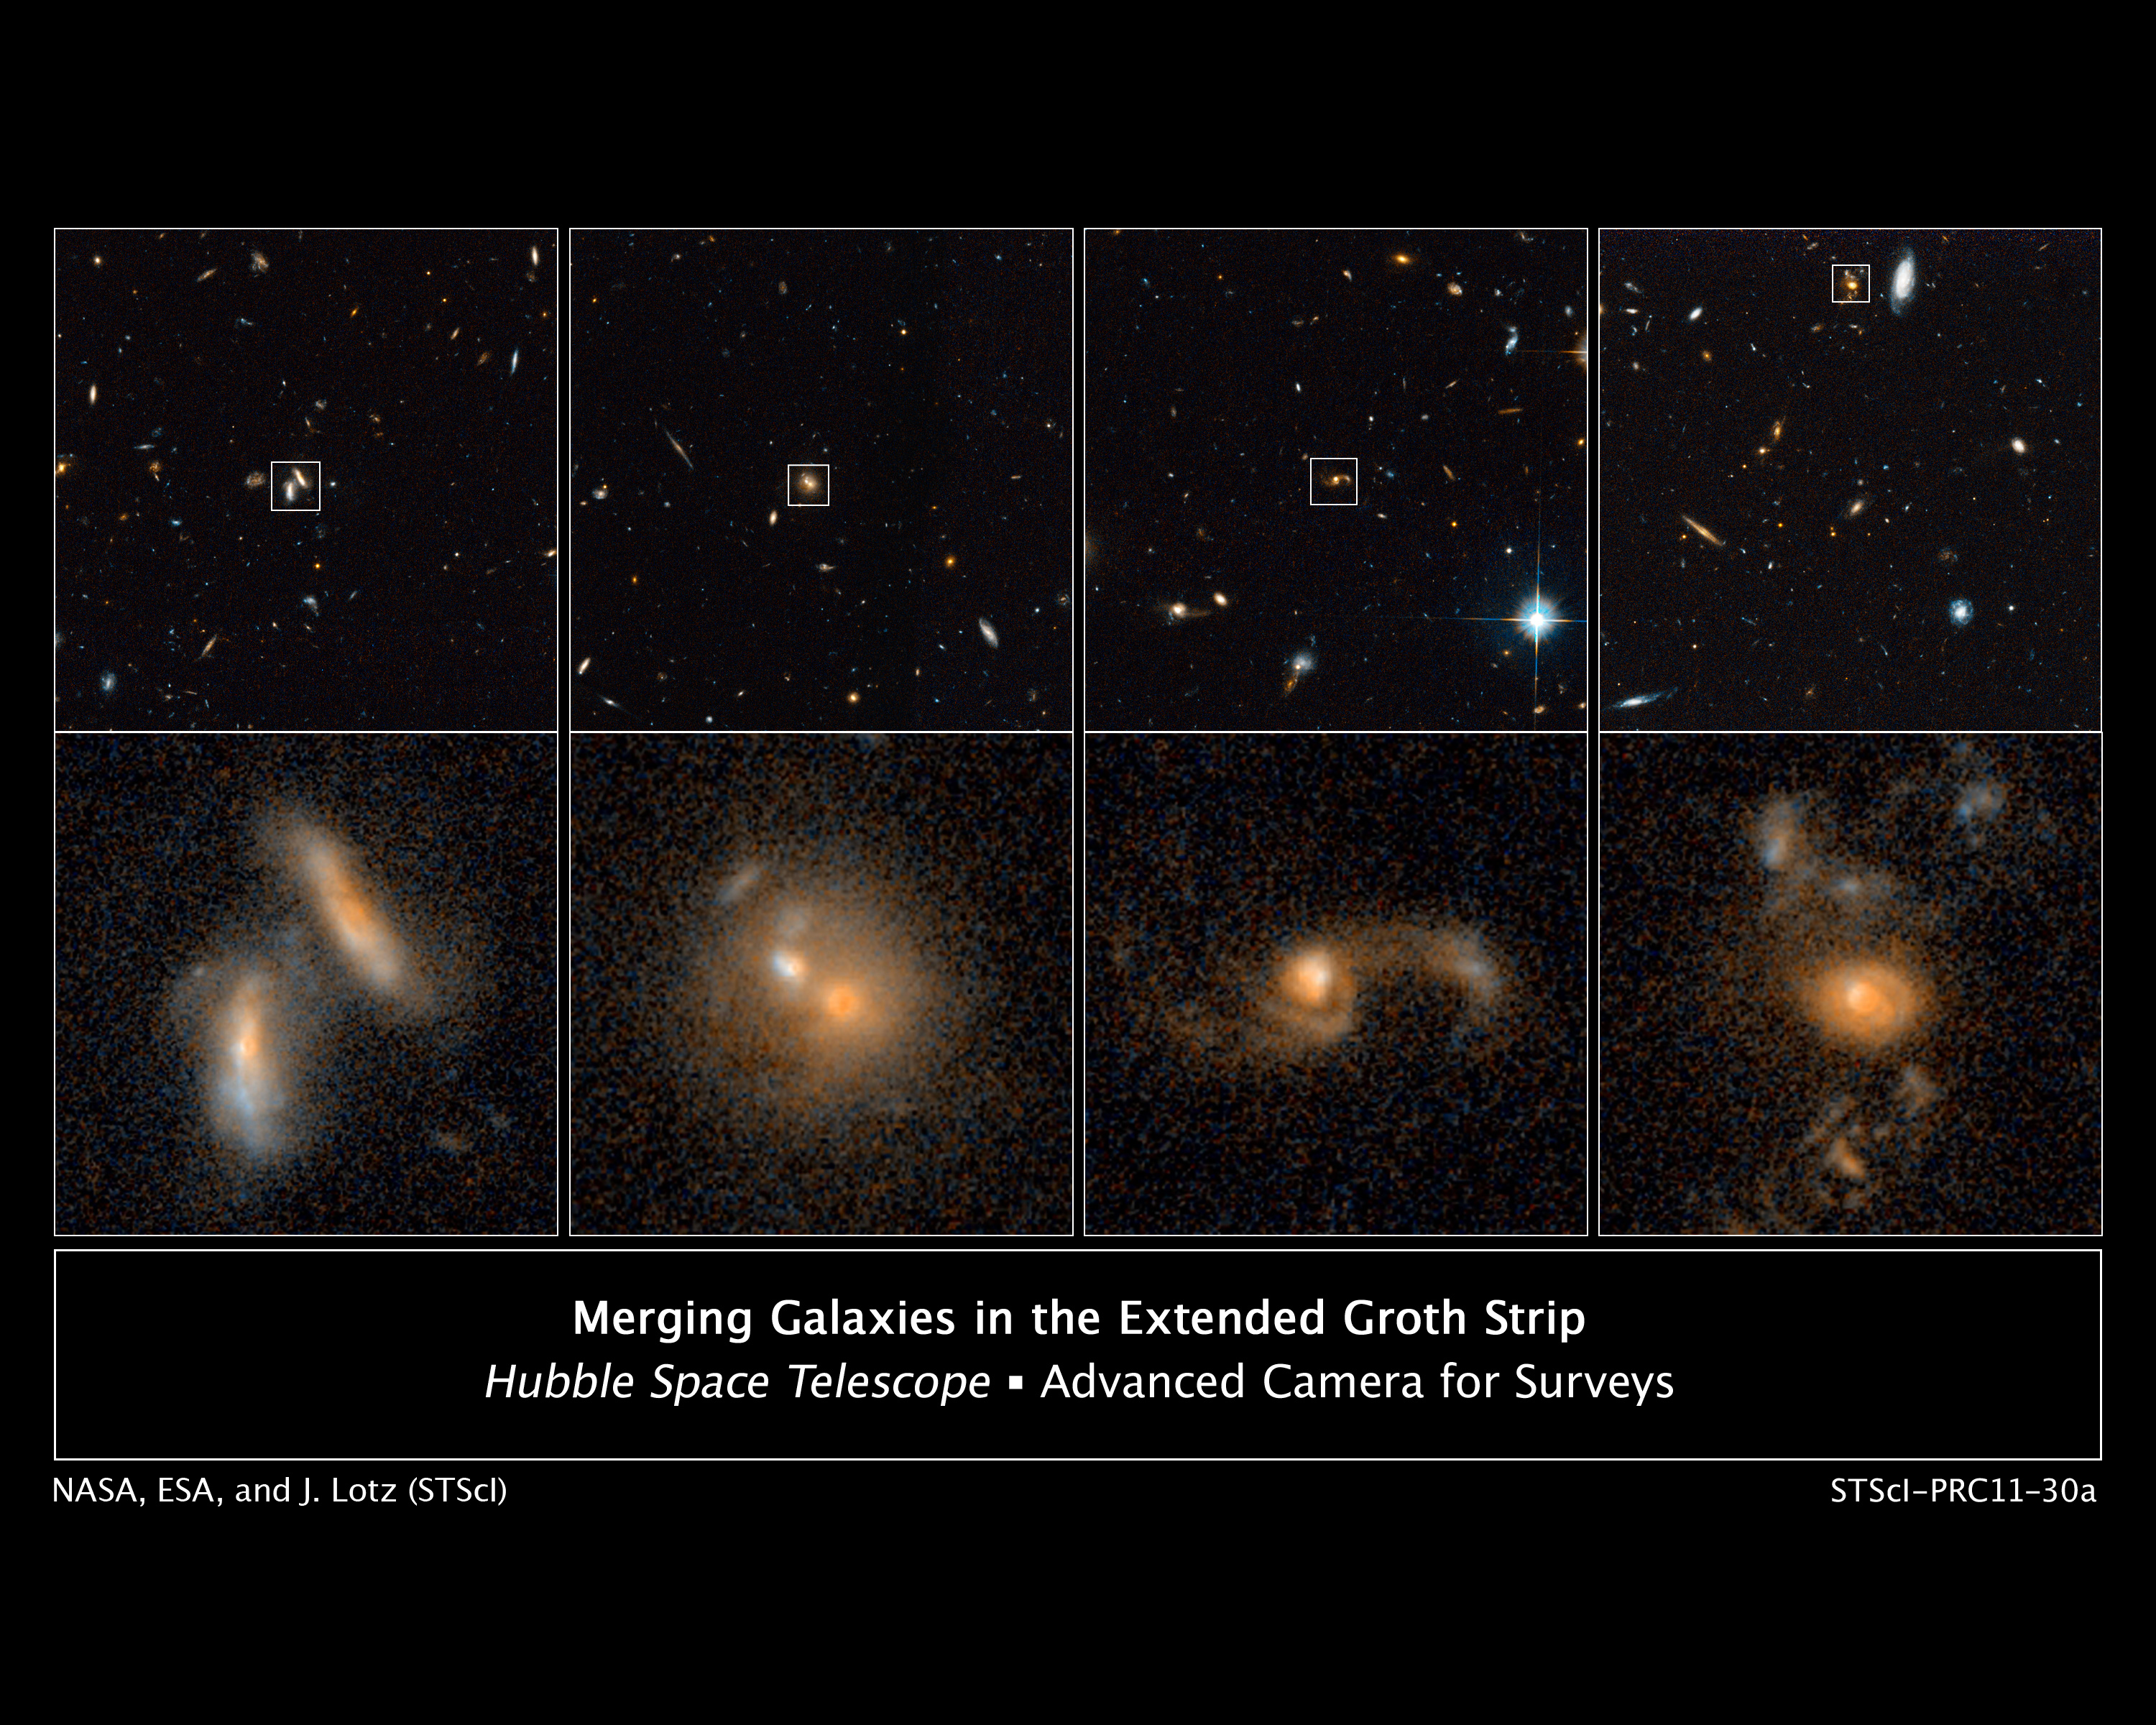

Merging galaxies in the Extended Groth Strip

These images from the NASA/ESA Hubble Space Telescope show four examples of interacting galaxies far away from Earth.

The galaxies, beginning at far left, are shown at various stages of the merger process.

The top row displays merging galaxies found in different regions of a large survey known as the All-Wavelength Extended Groth Strip International Survey (AEGIS). The images were taken in 2004 and 2005 by Hubble's Advanced Camera for Surveys.

More detailed views of those galaxies are shown in the bottom row of images. The image at far left shows a close pair of galaxies that are just beginning to interact. The next image reveals two galaxies that are coalescing, yet still have two distinct cores. The third image displays a merging system with distorted spiral arms. The image at far right reveals the union of two galaxies, which still show signs of an irregular structure.

By studying many galaxy interactions at various distances from Earth, astronomers can measure the rate at which galaxies merge over time. This information yields important clues about how galaxies have changed throughout the universe's history.

Credit: NASA, ESA, J. Lotz (STScI), M. Davis (University of California, Berkeley), and A. Koekemoer (STScI)